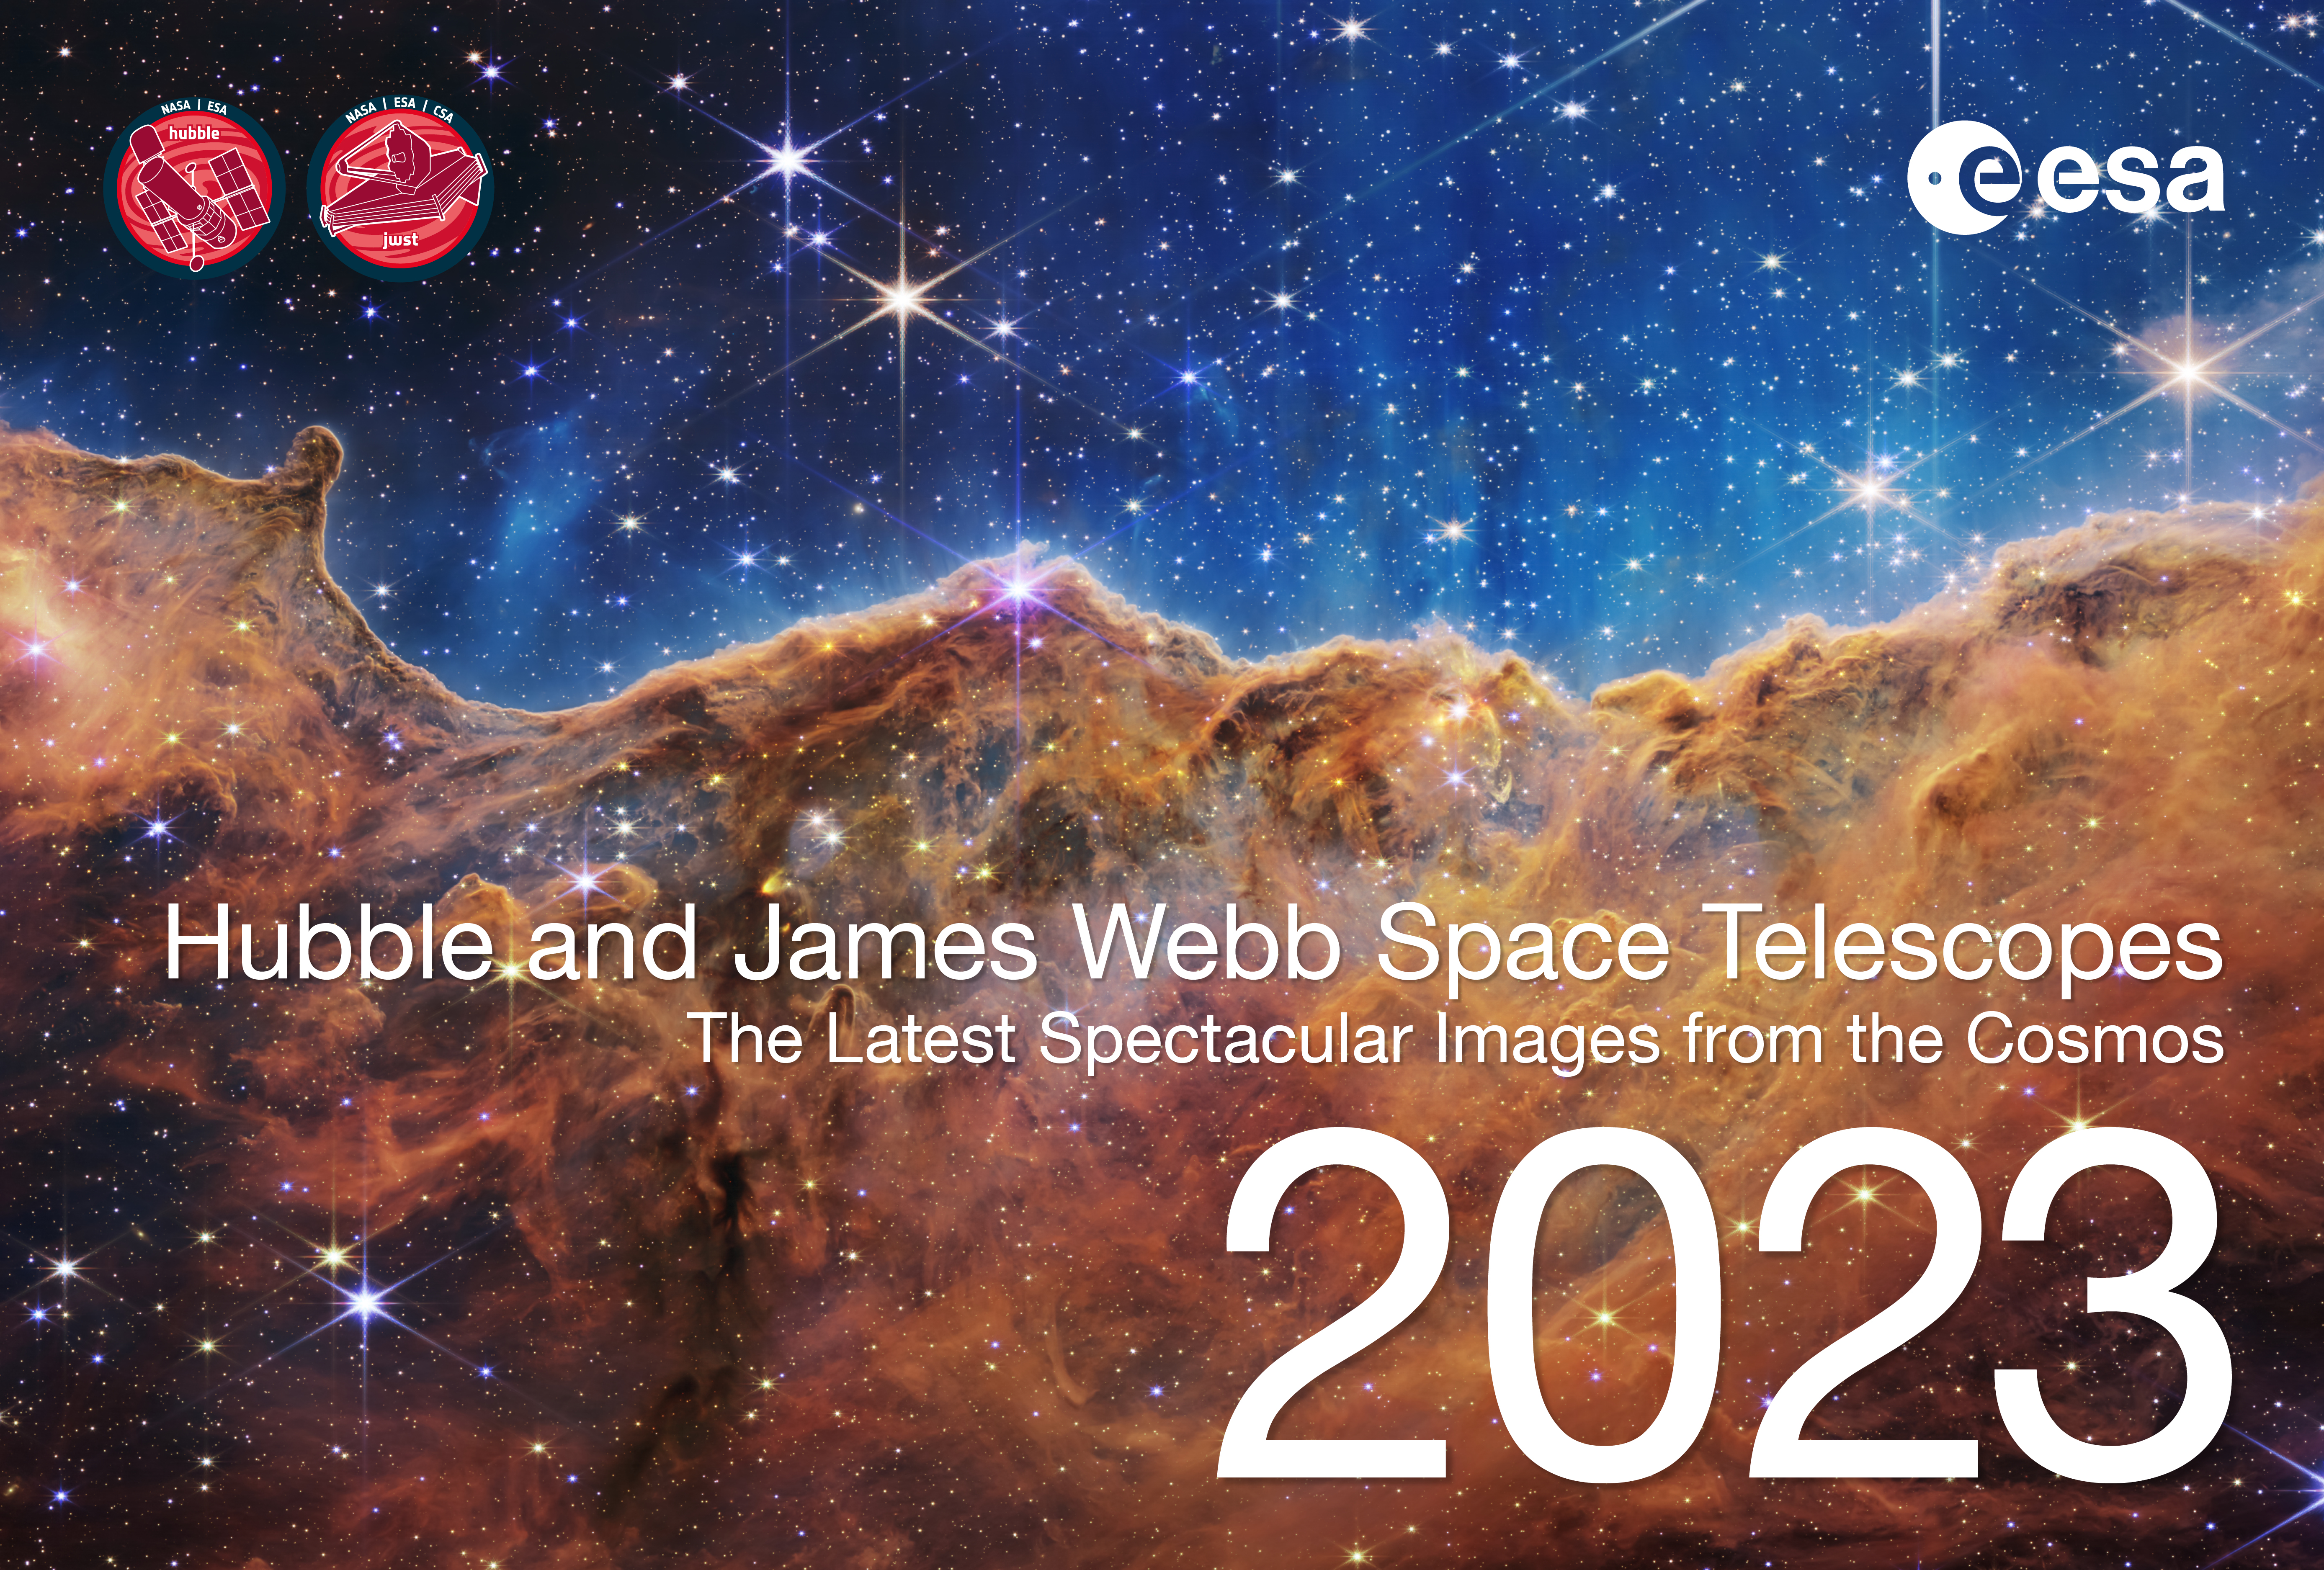

Cover Page of the 2023 ESA/Hubble and ESA/Webb Calendar

This is the cover page for the 2023 ESA/Hubble and ESA/Webb Calendar, featuring images released in 2022.

The electronic version of the calendar is available in digital (low and high resolution) and print-ready versions for everyone to share and enjoy.

Credit: ESA/Hubble, ESA/Webb